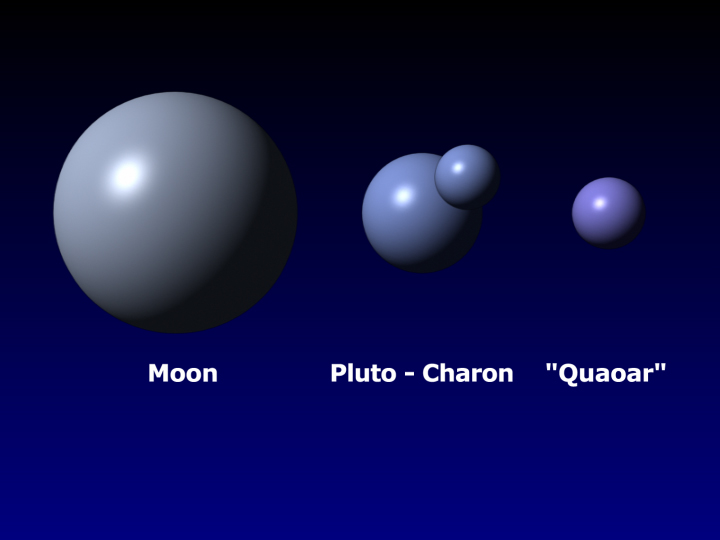

Quaoar's size compared with Earth's Moon, Pluto, and Charon

Approximately half the size of Pluto, the icy world 2002 LM60, dubbed "Quaoar" (pronounced kwa-whar) by its discoverers, is the farthest object in the solar system ever to be resolved by a telescope.

Credit: NASA/ESA, A. Feild, and G. Bacon (STScI)